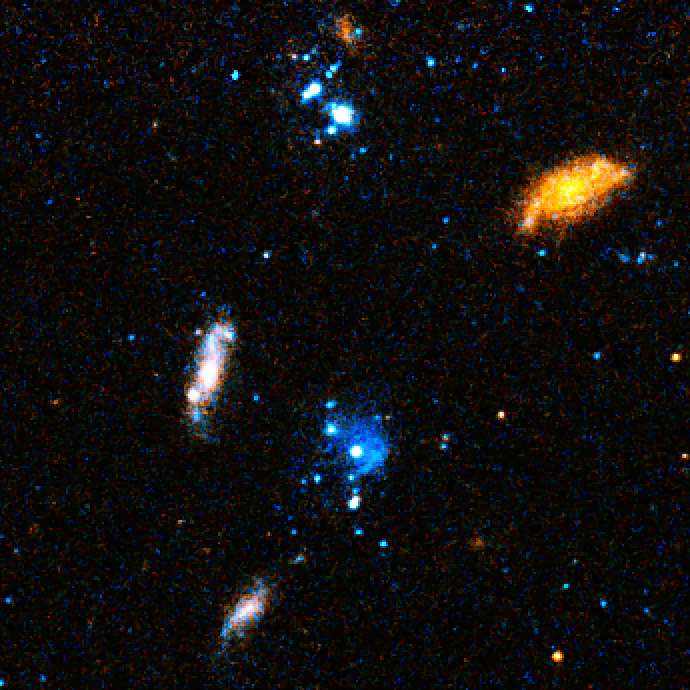

Close-up on "blue blobs"

A Hubble Space Telescope visible light close-up of bright blue star clusters in Arp's Loop in the M81-M82 galaxy group.

Credit: NASA, ESA, and D. de Mello (Catholic University of America/GSFC)